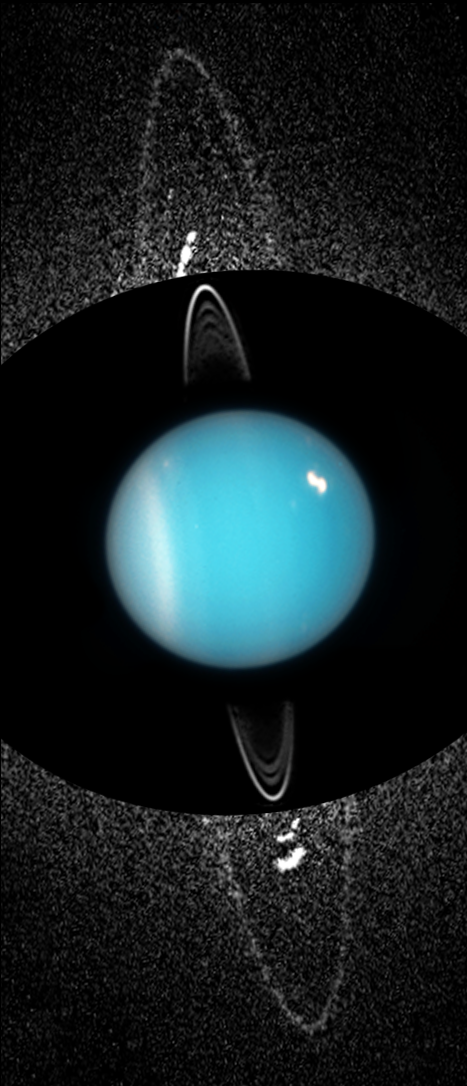

Uranus: 2005 (Unannotated)

These composite images from several observations by NASA/ESA Hubble Space Telescope reveal a pair of newly discovered rings encircling the planet Uranus. The left composite image is made from Hubble images taken in 2003. The new dusty rings are extremely faint and required long exposures to capture their image. The background speckle pattern is noise in the image. The outermost ring (R/2003 U 1) is likely replenished by dust blasted off a newly discovered satellite called Mab, embedded in the ring and visible as a bright streak at the top of the outer ring. The new outermost ring is twice the radius of the previously known ring system around Uranus, as seen near image center. (The inner rings are much brighter, so no noise is visible in the background). Approximately halfway between the outermost ring and inner ring system is a second newly discovered ring (R/2003 U2). Only a faint segment of it appears at the 12:00 o'clock position. Because of the long exposures, the moons are smeared out and appear as arcs within the ring system.

Credit: NASA, ESA, and M. Showalter (SETI Institute)